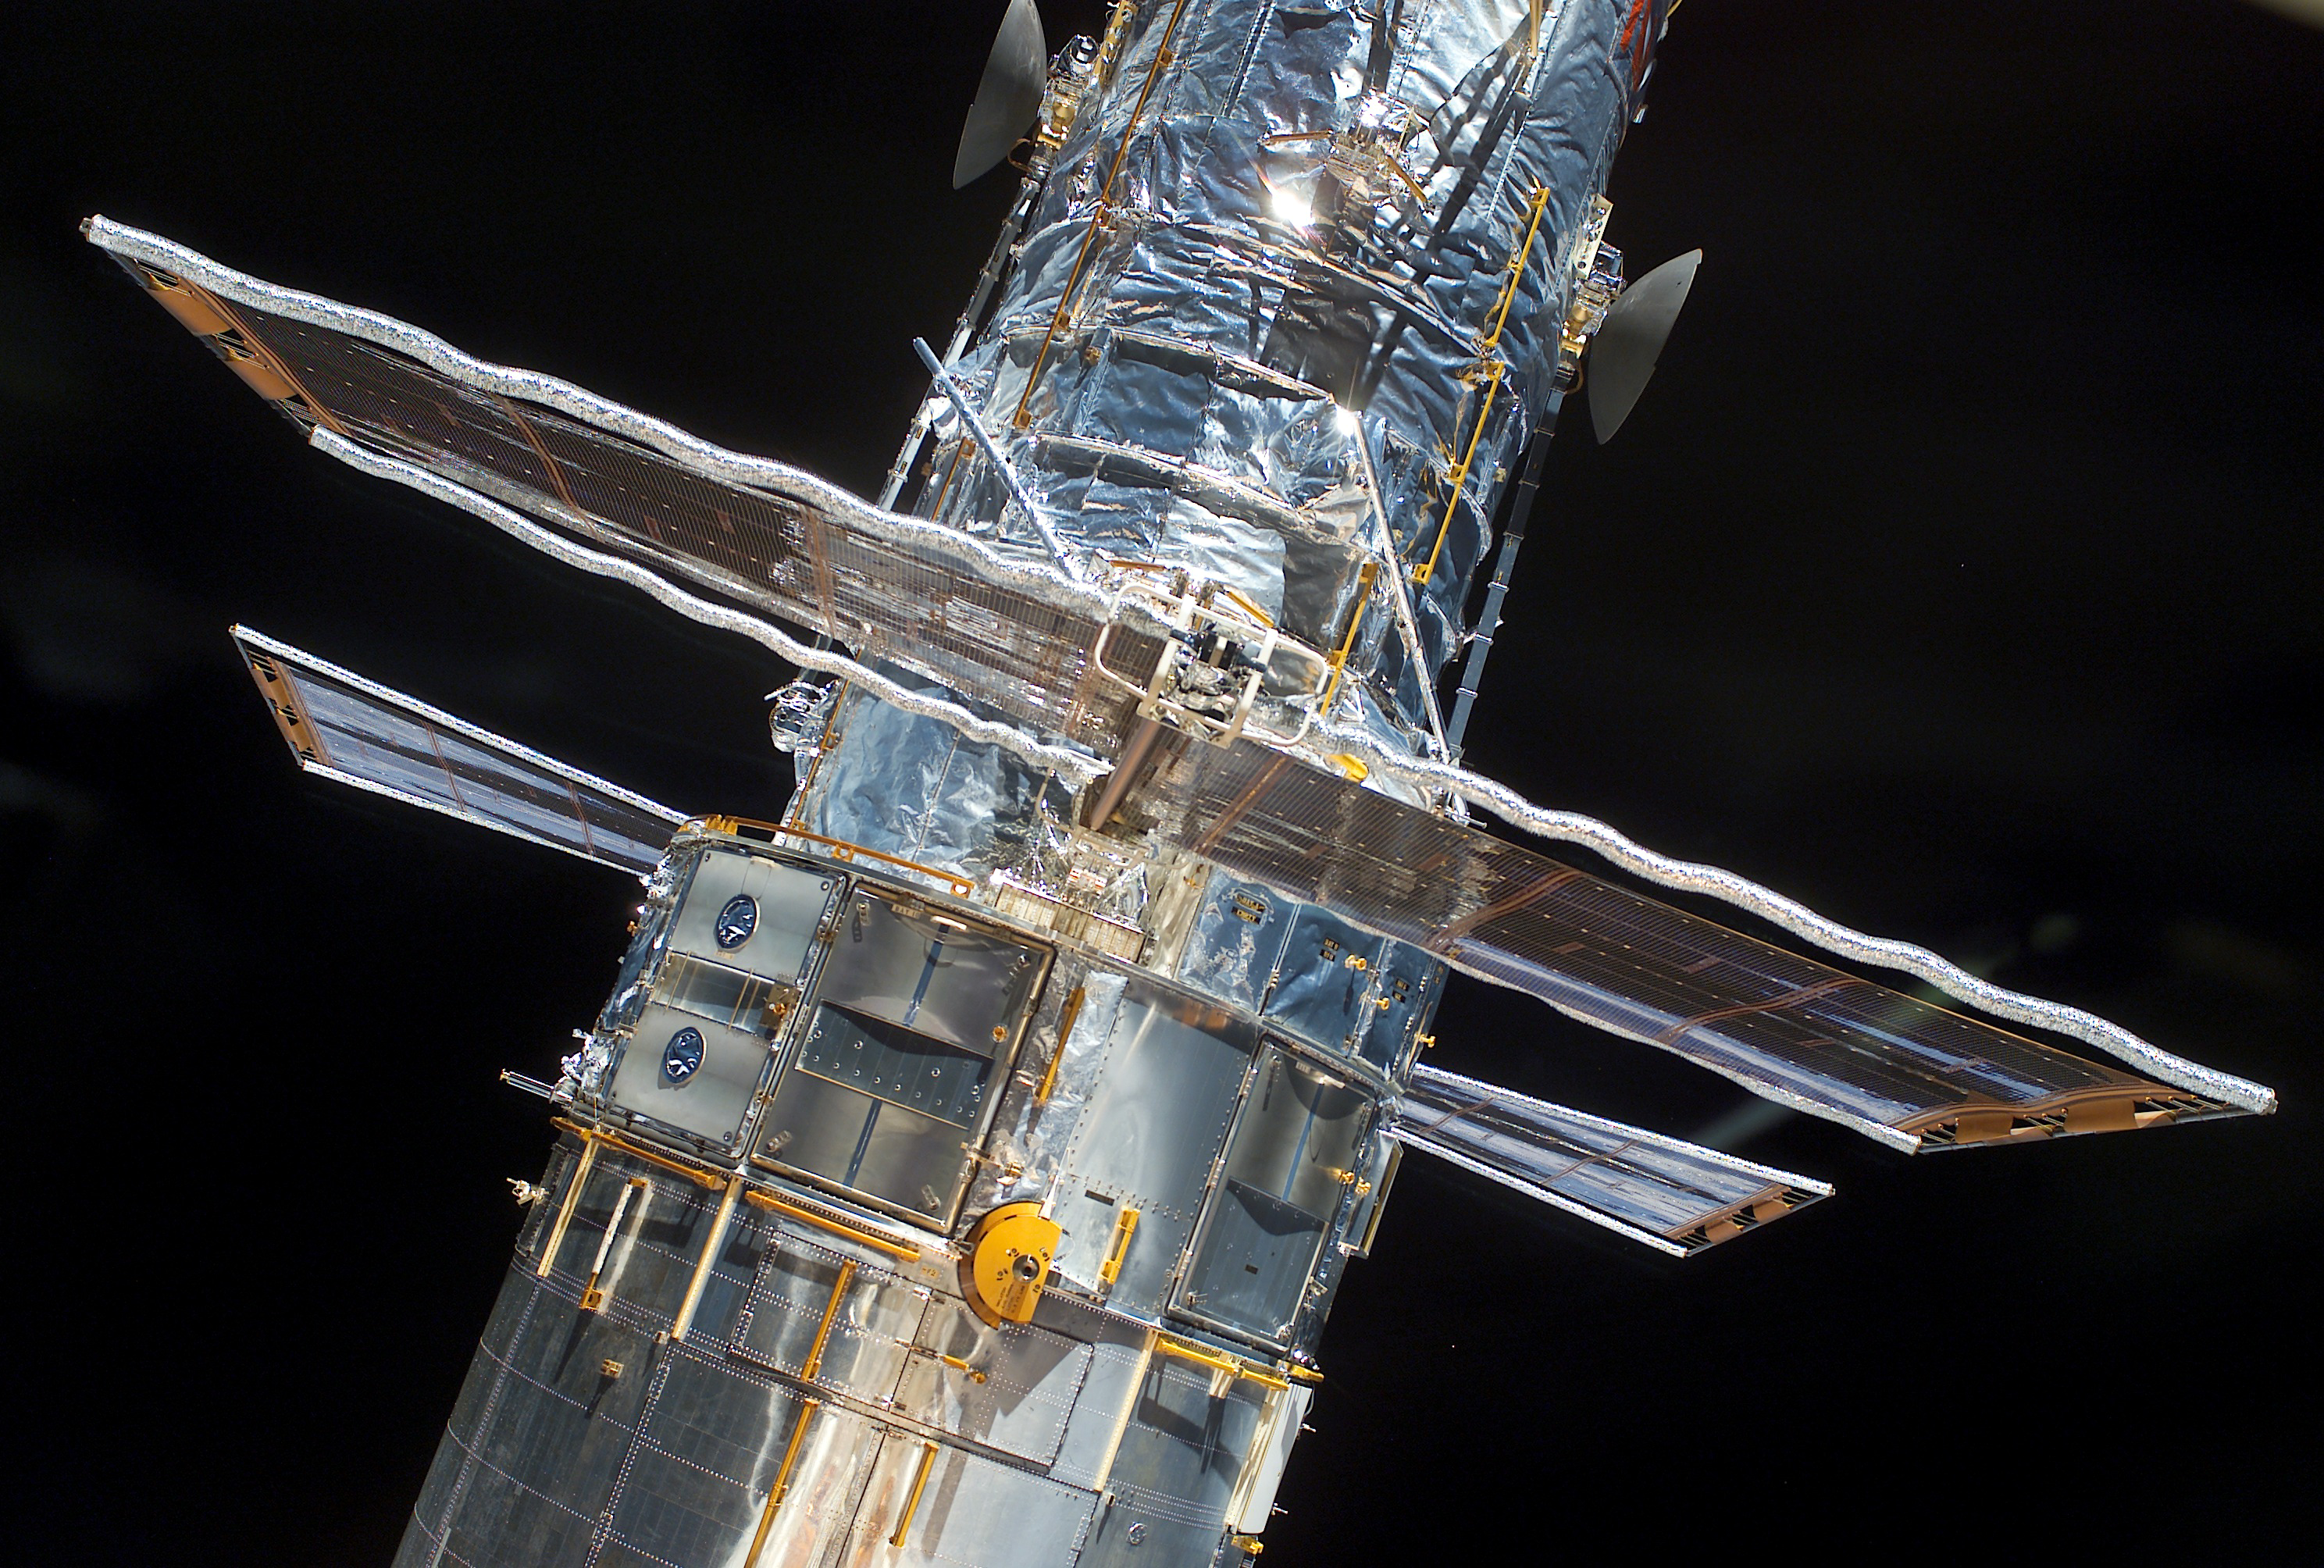

Last roll-up for the solar panels

A closer look at the Solar Panels while being rolled up during SM3B

Credit: NASA & ESA